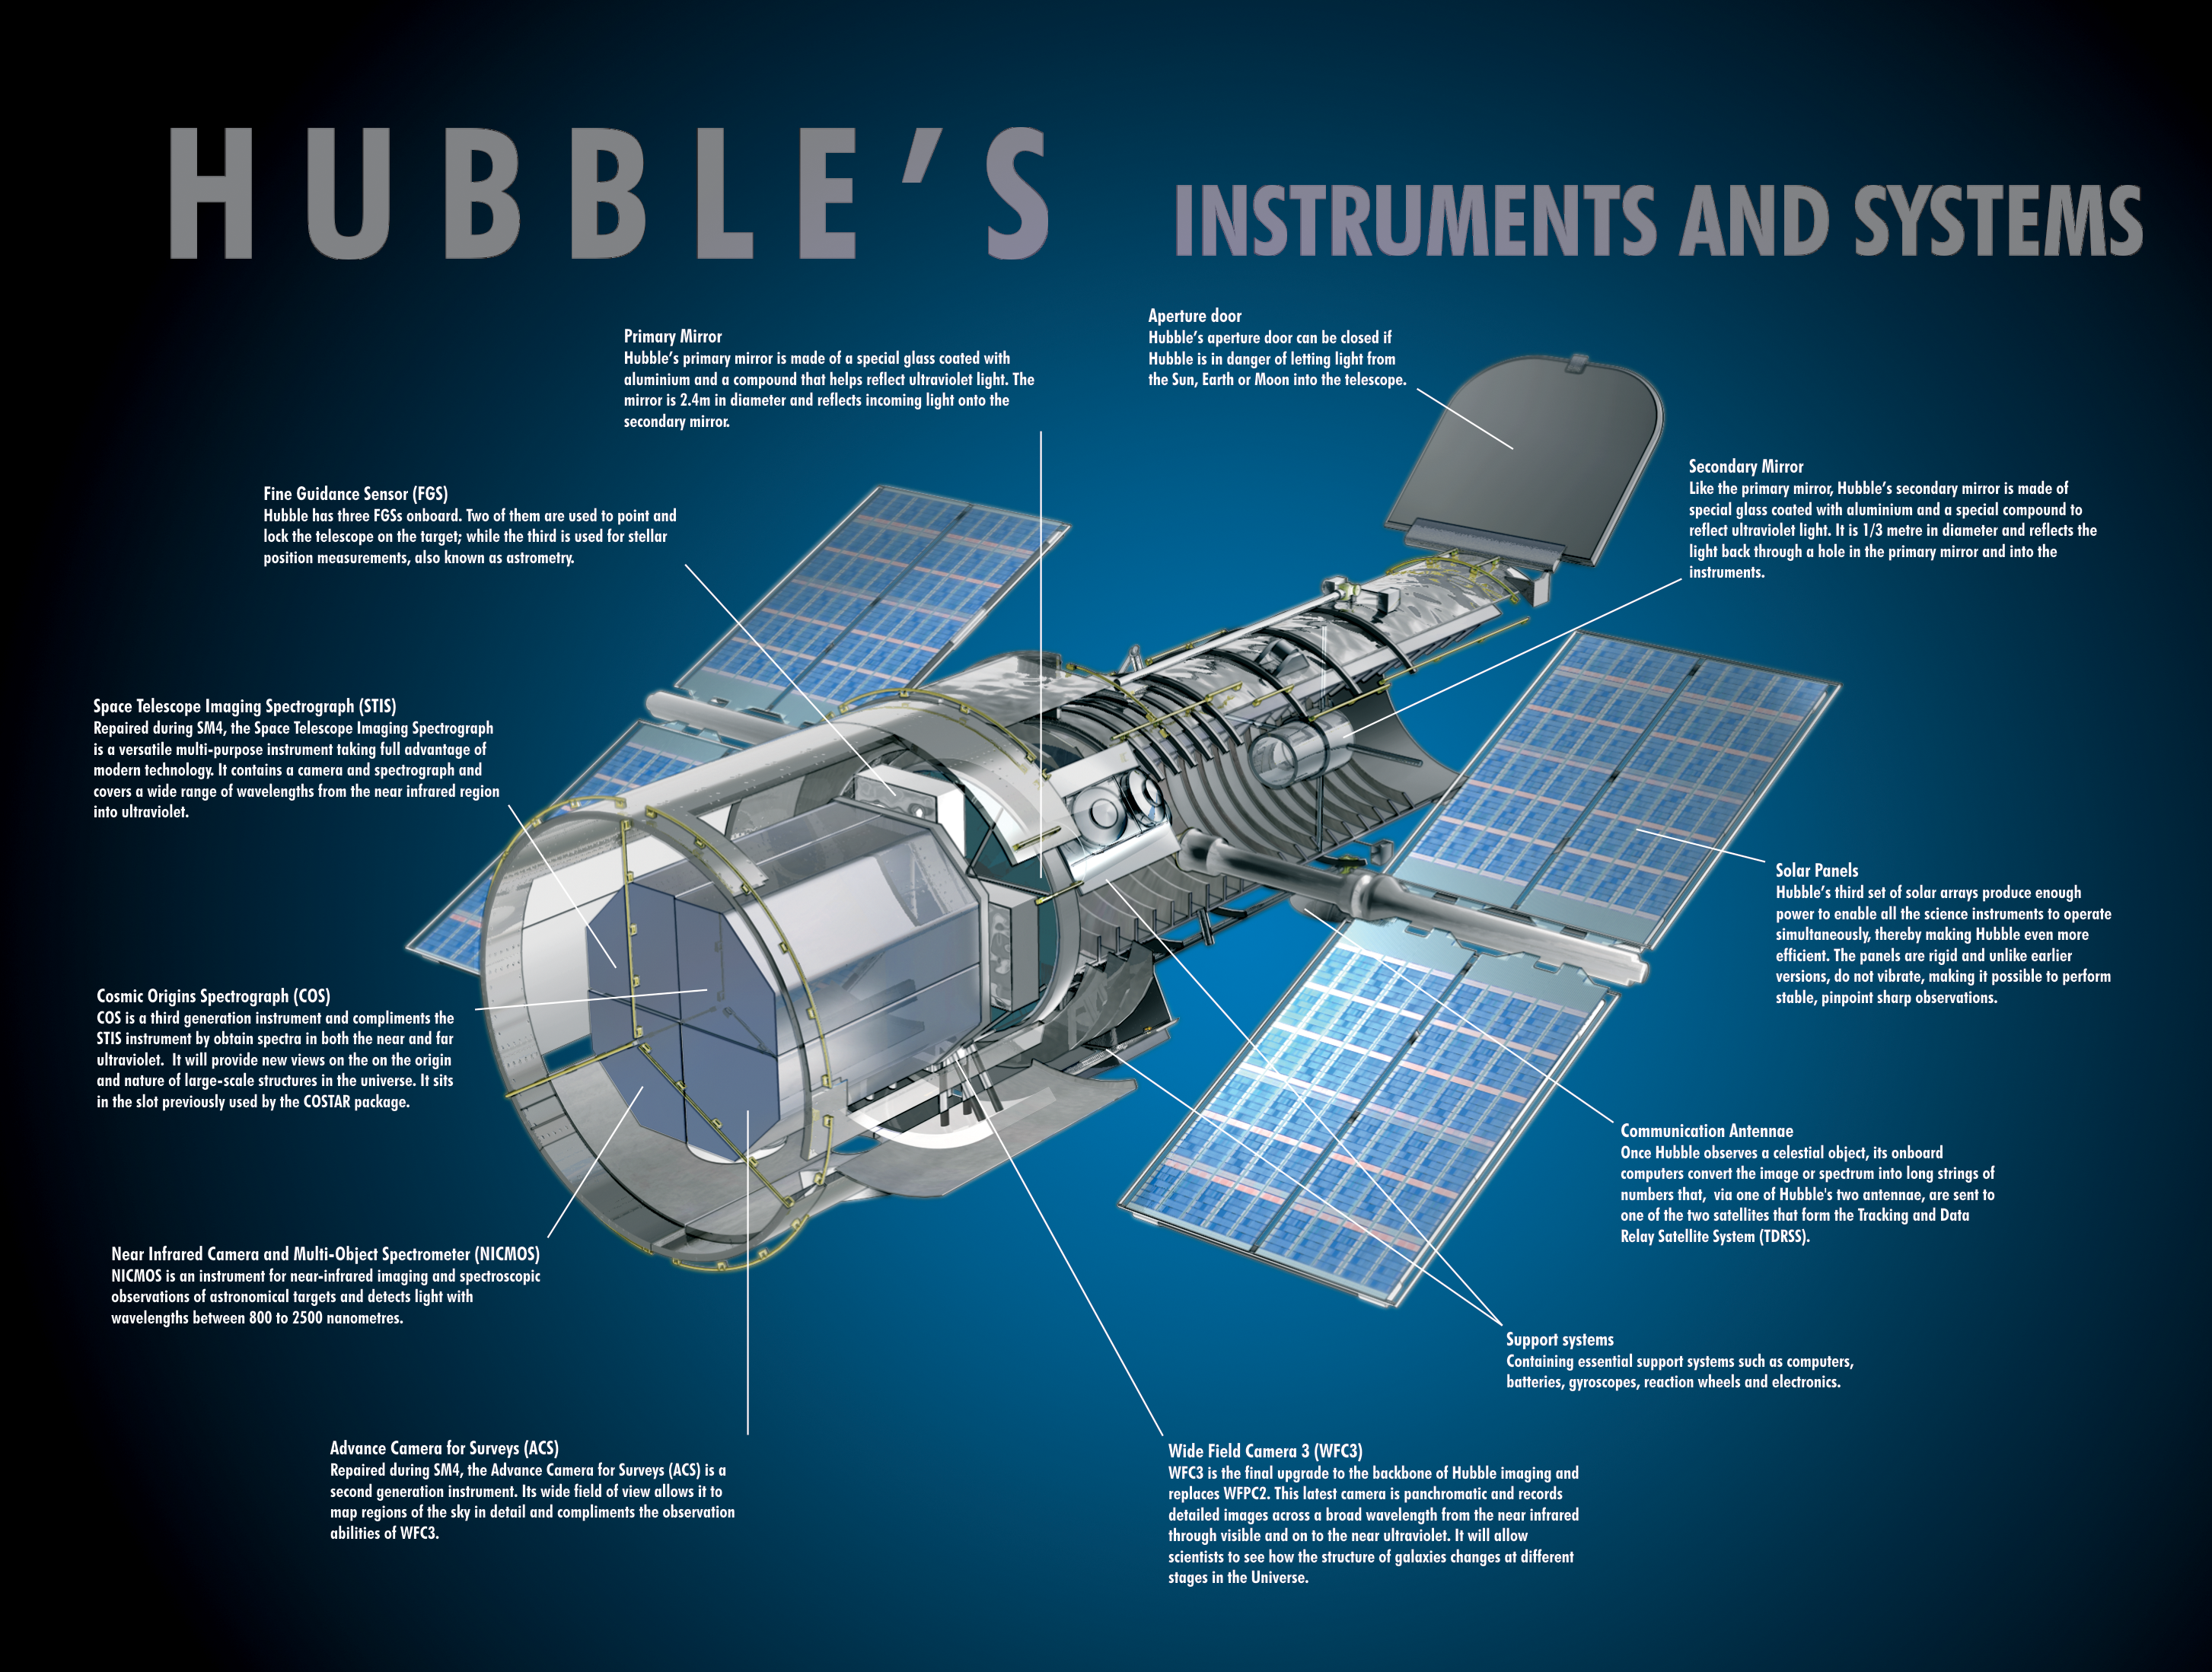

Hubble exploded view

Hubble Exploded View (Annotated)

Credit: NASA & ESA